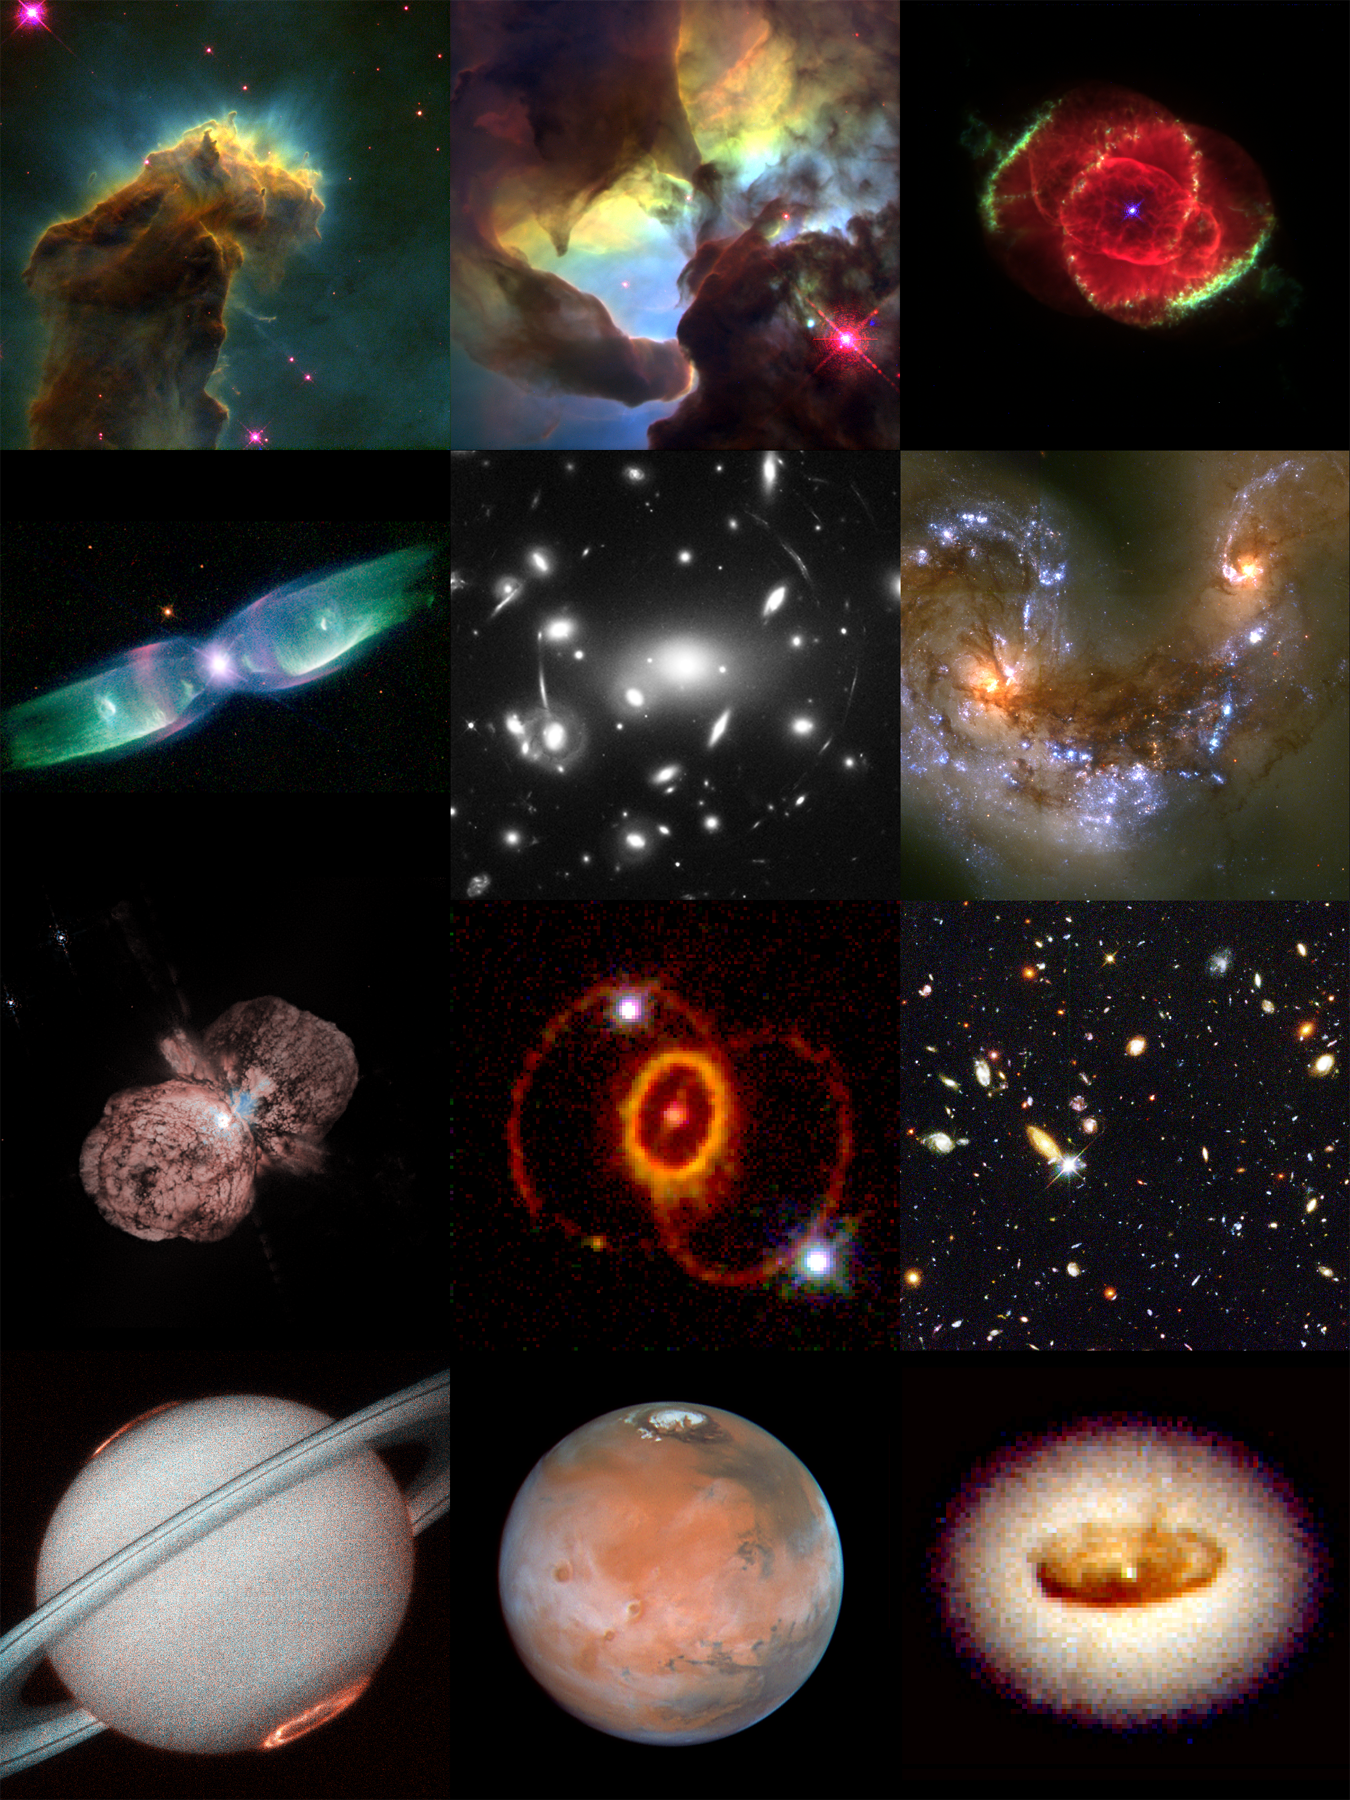

Hubble's Smash Hits

A collection of Hubble Space Telescope's most iconic images.

Credit: NASA & ESA